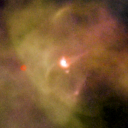

109-246

One of 42 new proplyds discovered in the Orion Nebula, 109-246 is one of the bright proplyds that lies relatively close to the nebula’s brightest star, Theta 1 Orionis C.

Credit: NASA/ESA and L. Ricci (ESO)